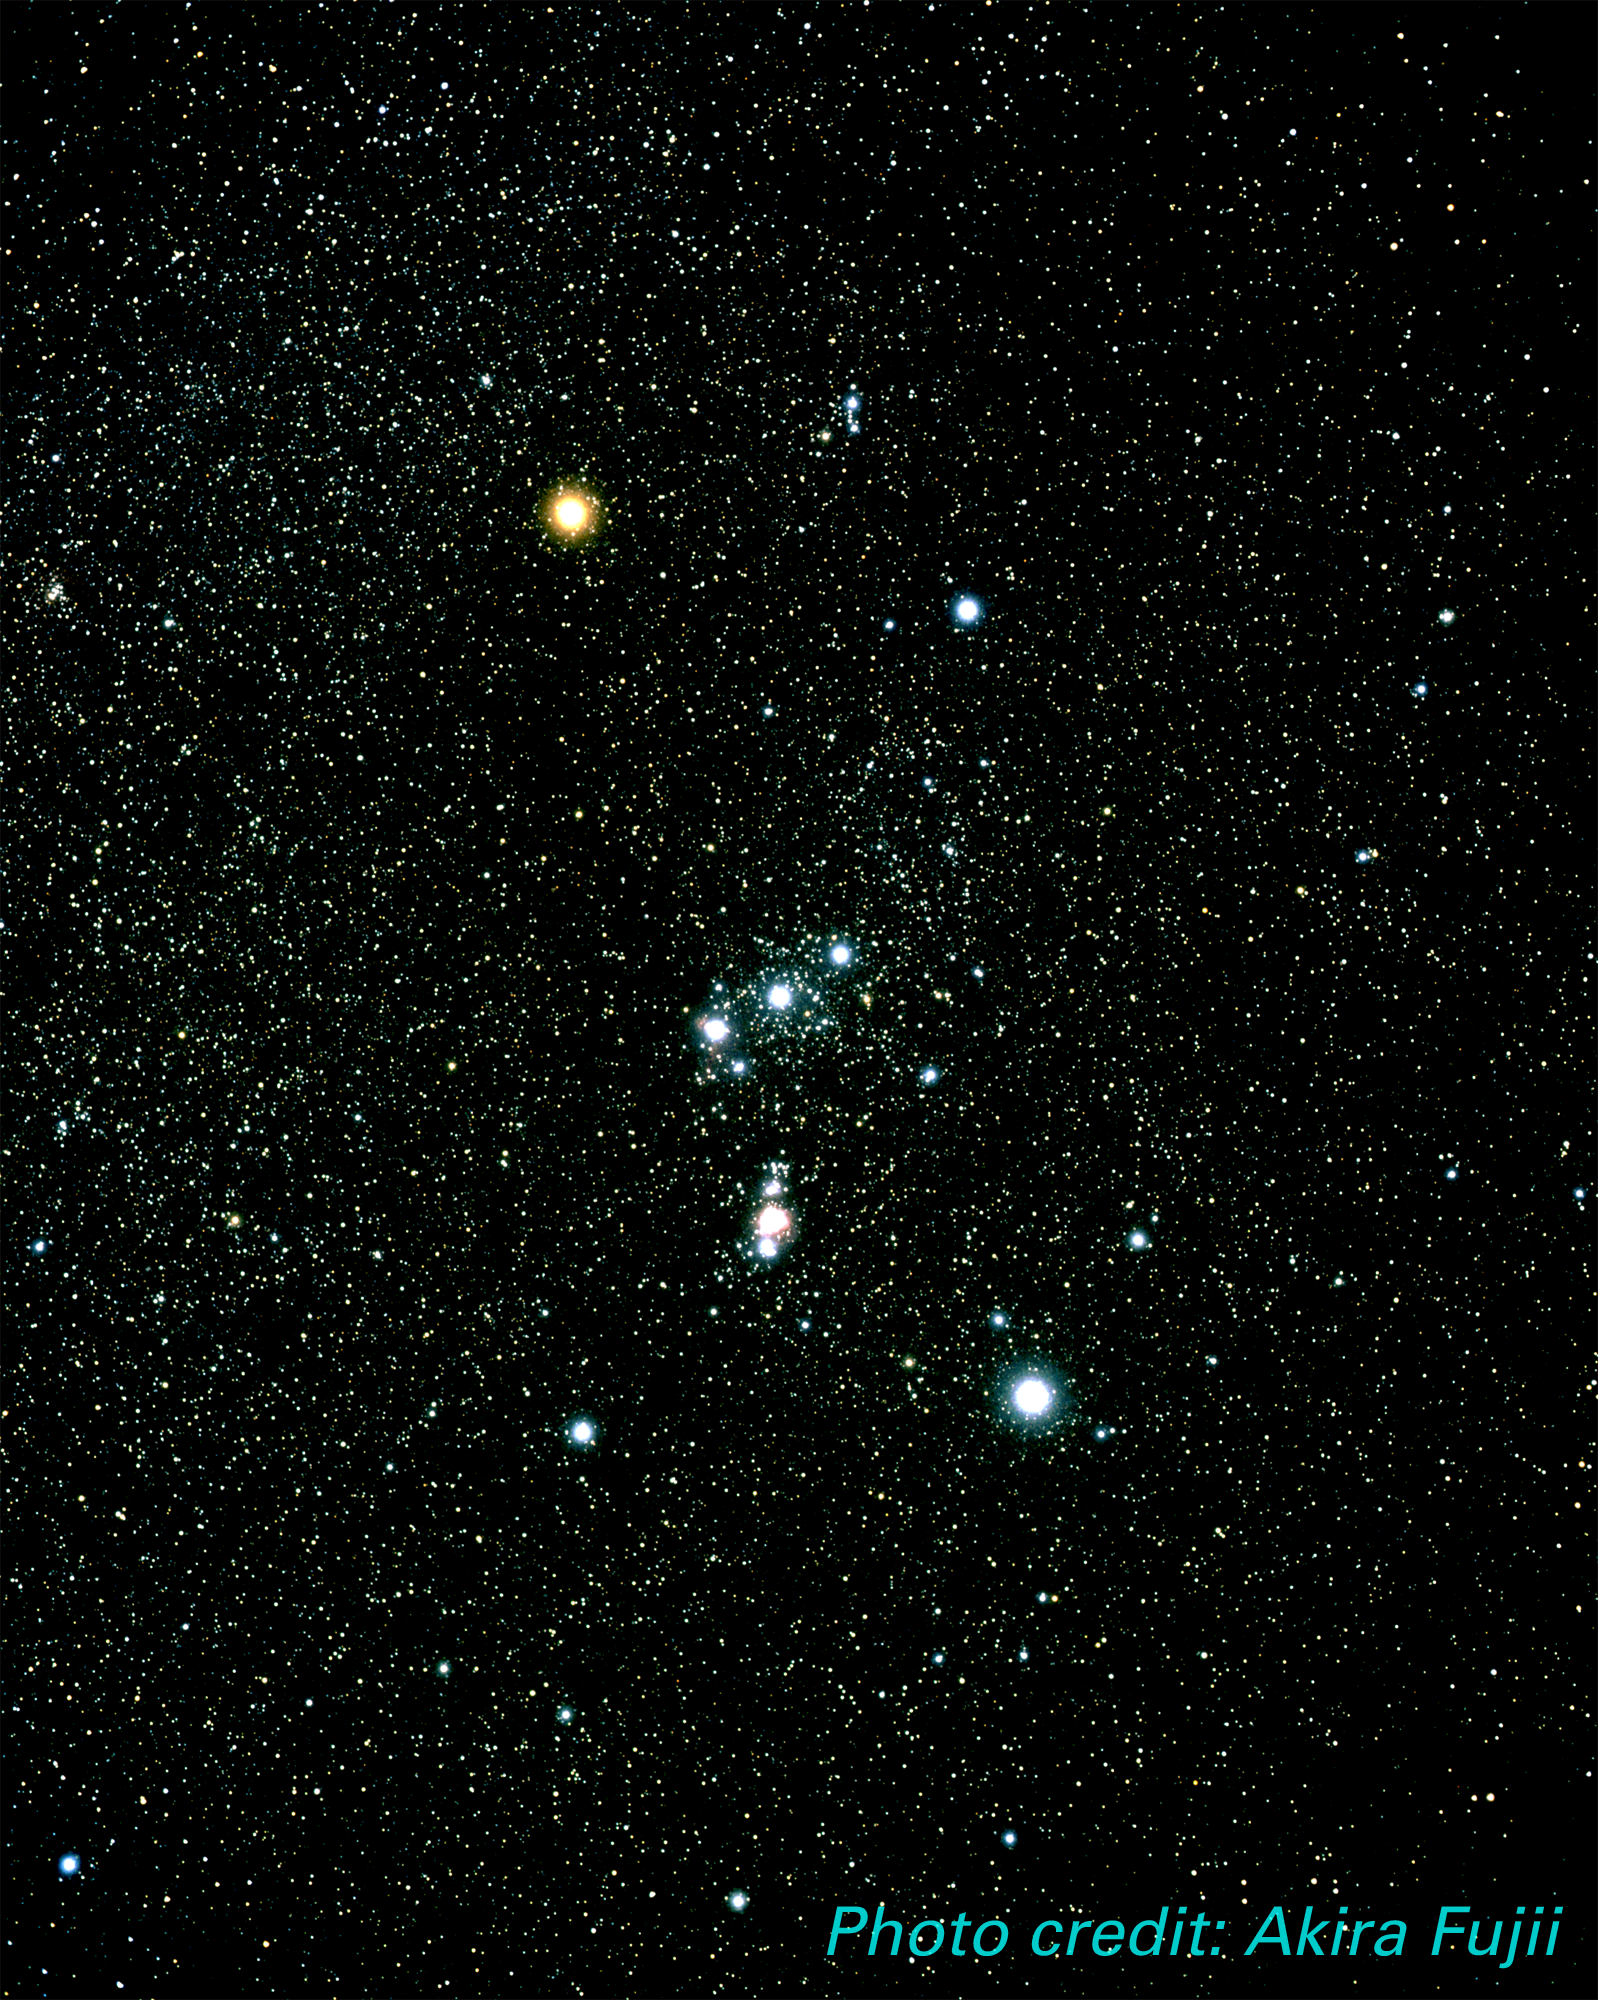

Orion Constellation (ground-based image)

Ground-based image of the Constellation of Orion.

The Hubble Space Telescope continues to reveal various stunning and intricate treasures that reside within the nearby, intense star-forming region known as the Great Nebula in Orion.

Credit: Akira Fujii